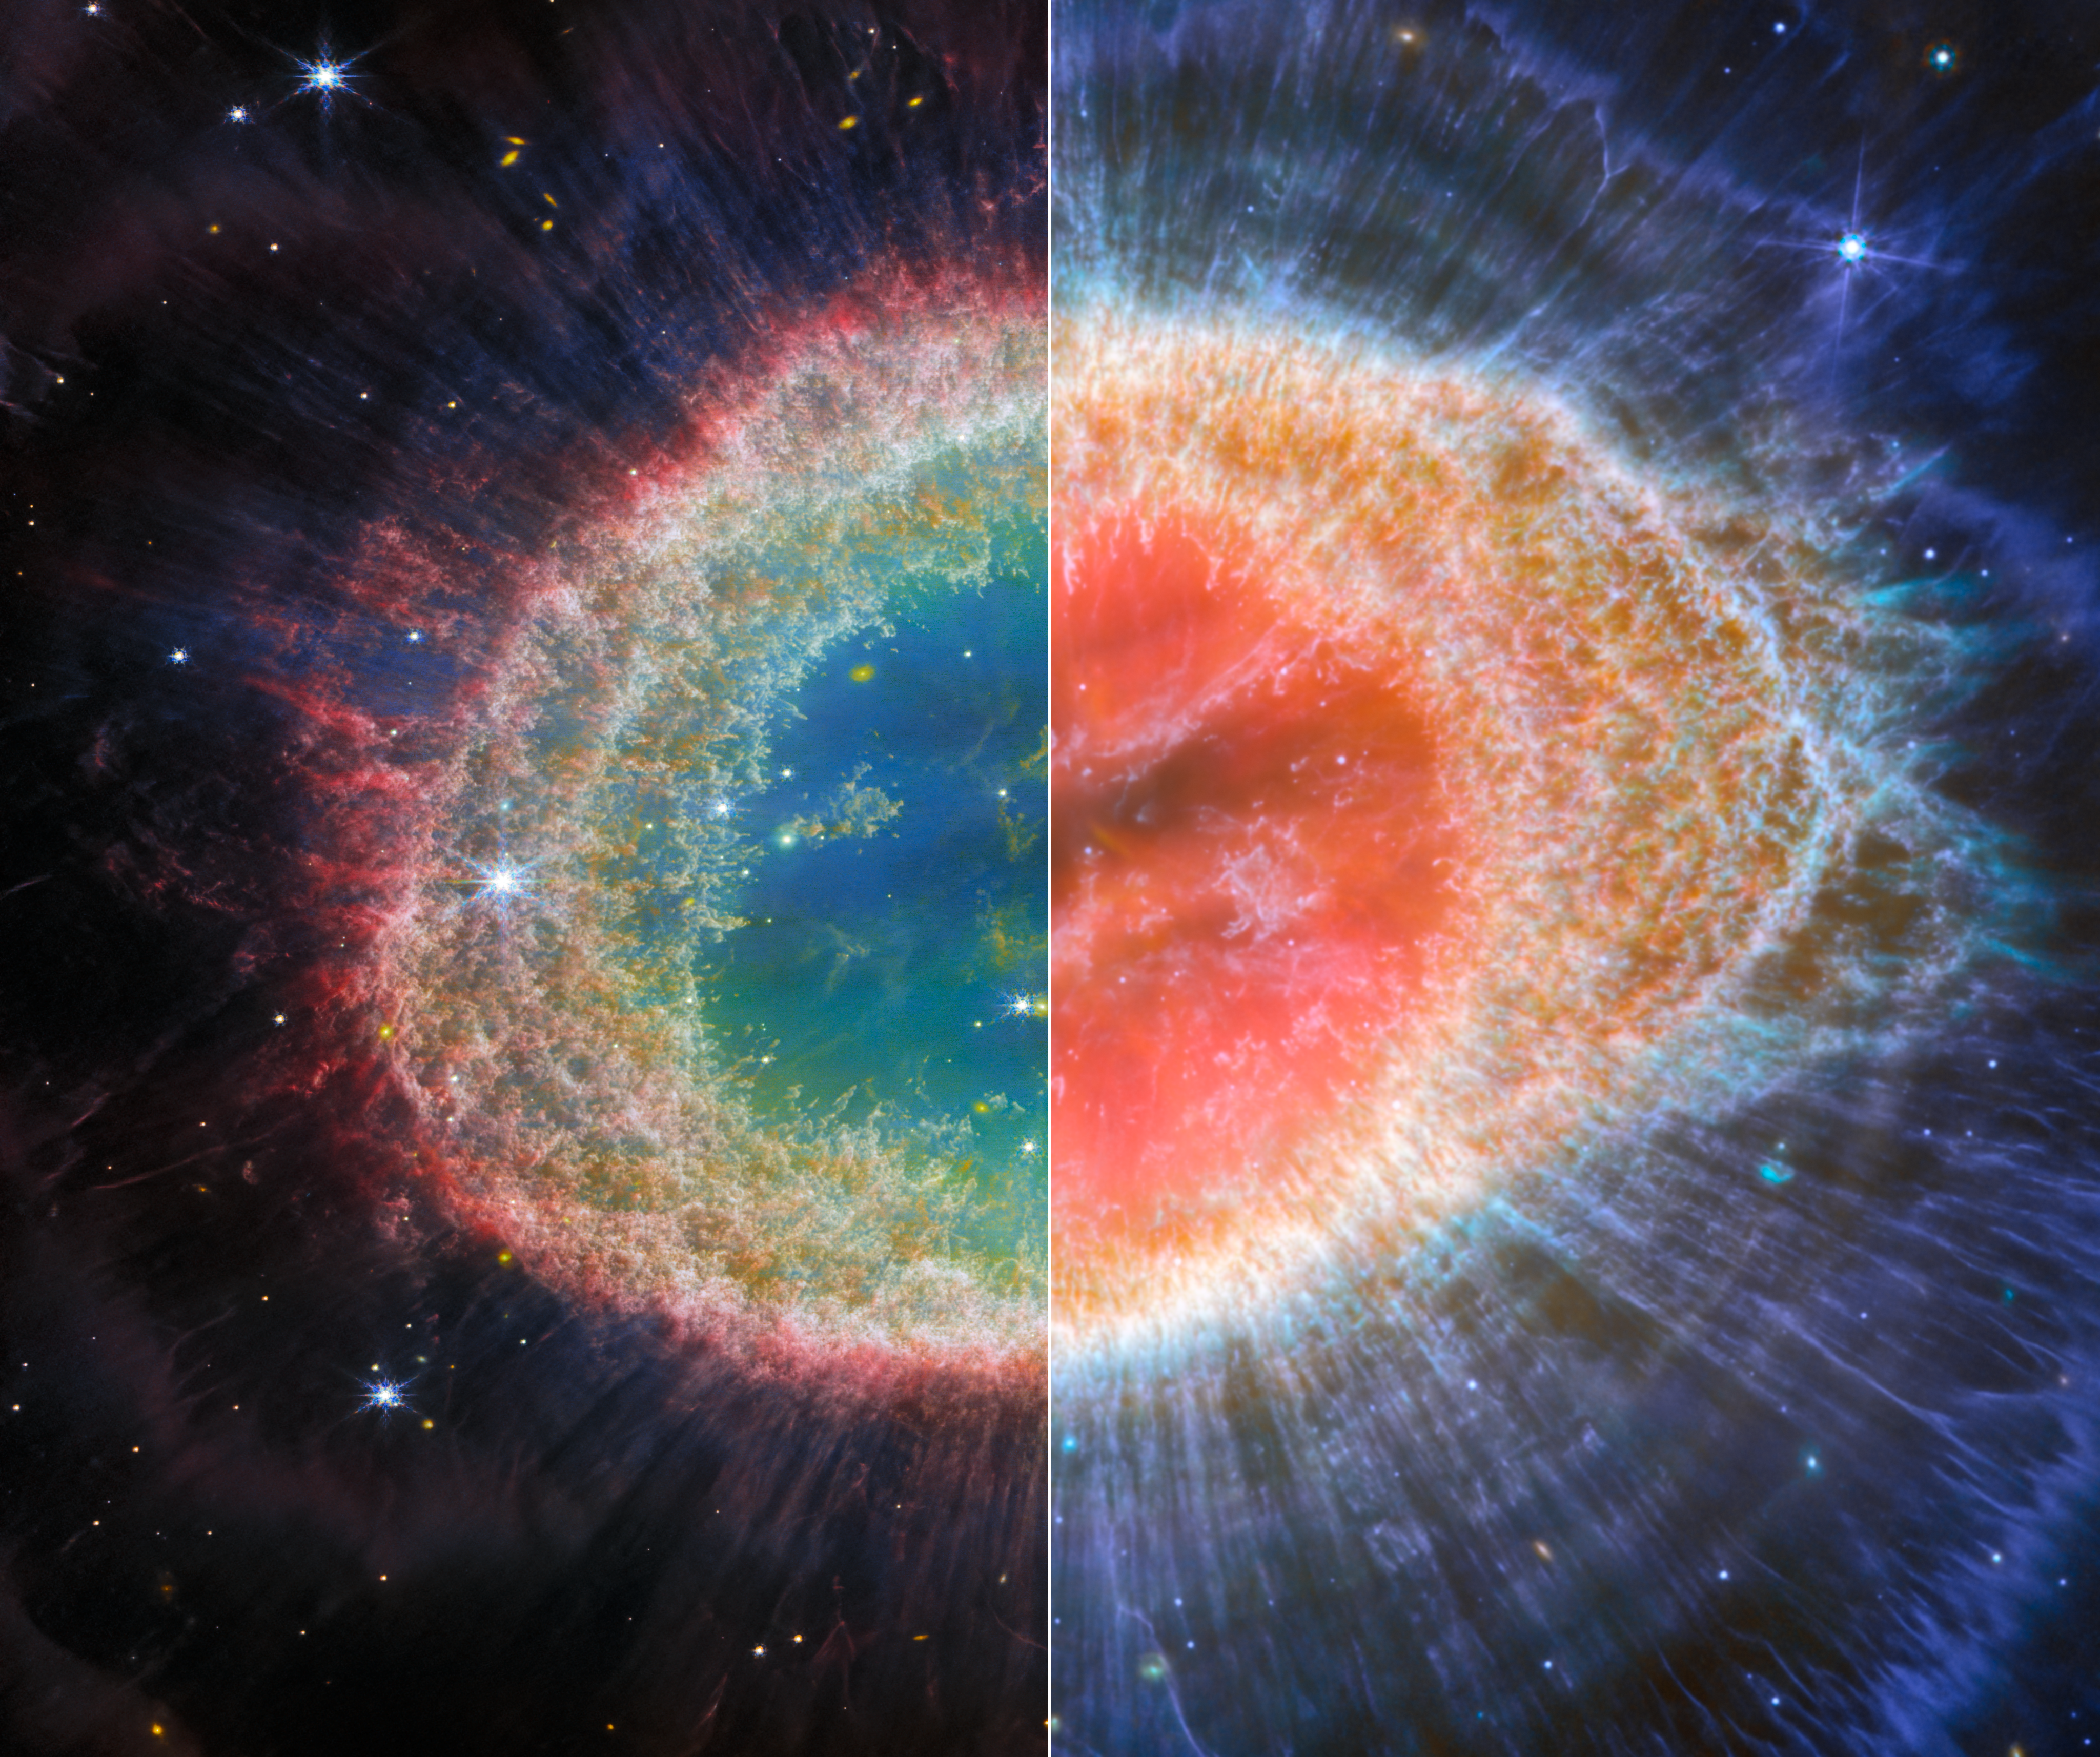

Webb captures detailed beauty of Ring Nebula (NIRCam and MIRI images)

The NASA/ESA/CSA James Webb Space Telescope has observed the well-known Ring Nebula with unprecedented detail. Formed by a star throwing off its outer layers as it runs out of fuel, the Ring Nebula is an archetypal planetary nebula. Also known as M57 and NGC 6720, it is both relatively close to Earth at roughly 2,500 light-years away.

The new images provide unprecedented spatial resolution and spectral sensitivity, which also reveal unique details across both infrared observations. For example, the new image from Webb’s NIRCam (Near-InfraRed Camera) shows the intricate details of the filament structure of the inner ring (left), while the new image from Webb’s MIRI (Mid-InfraRed Instrument) reveals particular details in the concentric features in the outer regions of the nebulae’s ring (right).

There are some 20,000 dense globules in the nebula, which are rich in molecular hydrogen. In contrast, the inner region shows very hot gas. The main shell contains a thin ring of enhanced emission from
carbon-based molecules known as polycyclic aromatic hydrocarbons (PAHs). Roughly ten concentric arcs are located just beyond the outer edge of the main ring. The arcs are thought to originate from the interaction of the central star with a low-mass companion orbiting at a distance comparable to that between the Earth and the dwarf planet Pluto. In this way, nebulae like the Ring Nebula reveal a kind of astronomical archaeology, as astronomers study the nebula to learn about the star that created it.

Credit: ESA/Webb, NASA, CSA, M. Barlow, N. Cox, R. Wesson